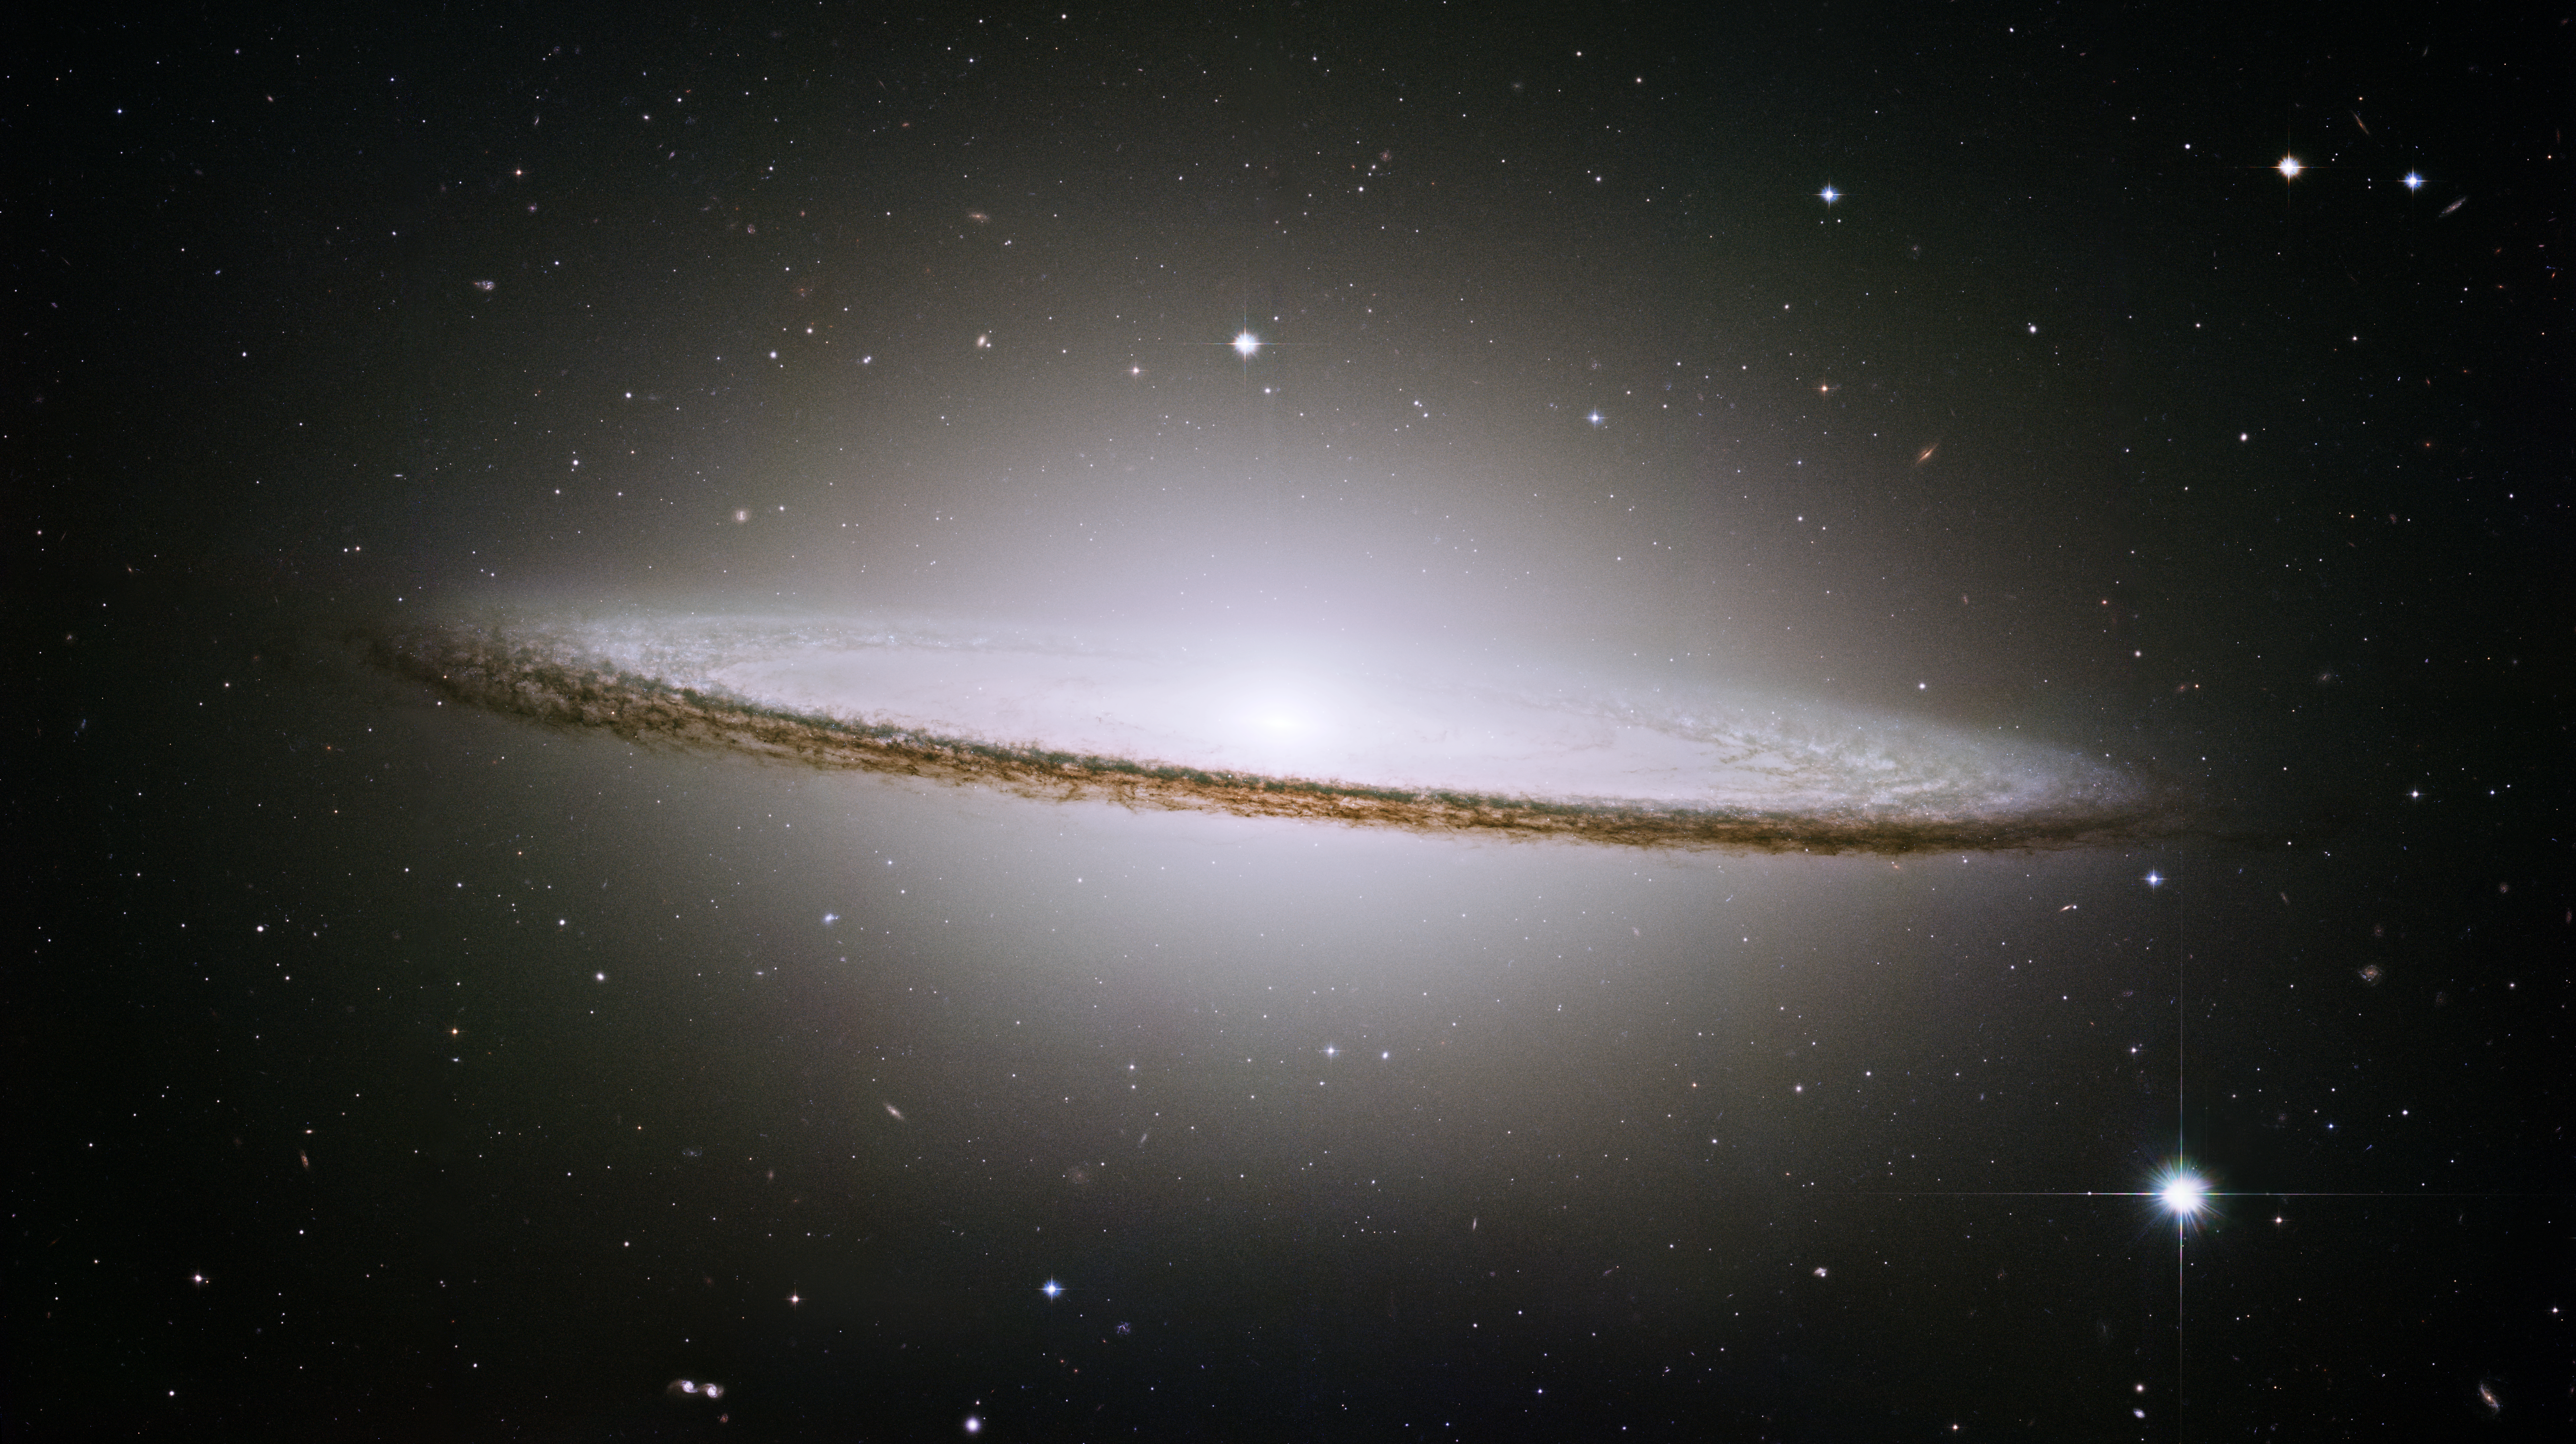

Hubble mosaic of the majestic Sombrero Galaxy

NASA/ESA Hubble Space Telescope has trained its razor-sharp eye on one of the universe's most stately and photogenic galaxies, the Sombrero galaxy, Messier 104 (M104). The galaxy's hallmark is a brilliant white, bulbous core encircled by the thick dust lanes comprising the spiral structure of the galaxy. As seen from Earth, the galaxy is tilted nearly edge-on. We view it from just six degrees north of its equatorial plane. This brilliant galaxy was named the Sombrero because of its resemblance to the broad rim and high-topped Mexican hat.

At a relatively bright magnitude of +8, M104 is just beyond the limit of naked-eye visibility and is easily seen through small telescopes. The Sombrero lies at the southern edge of the rich Virgo cluster of galaxies and is one of the most massive objects in that group, equivalent to 800 billion suns. The galaxy is 50,000 light-years across and is located 30 million light-years from Earth.

Credit: NASA/ESA and The Hubble Heritage Team (STScI/AURA)